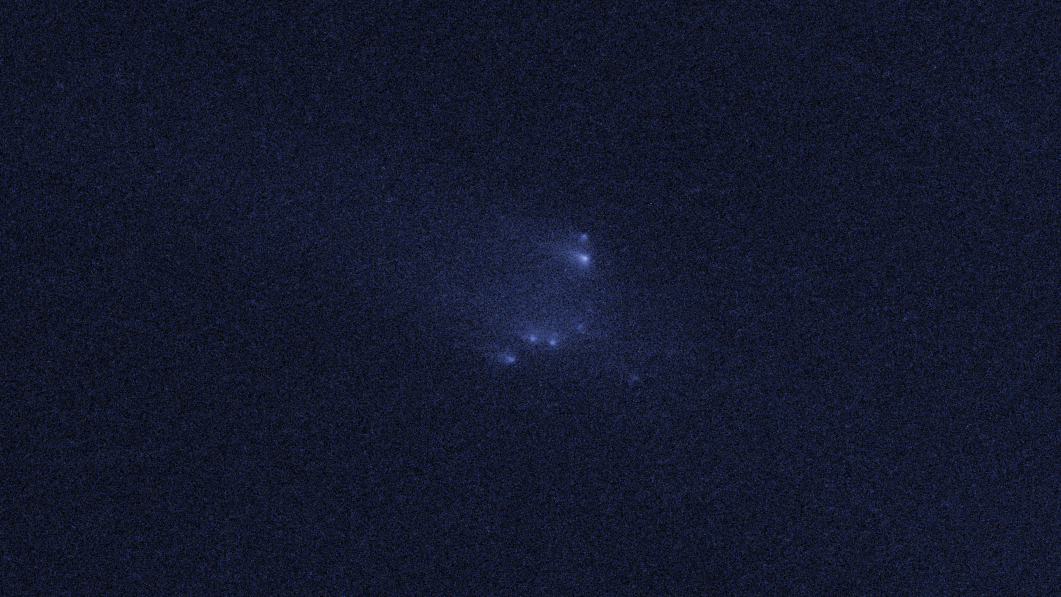

Disintegrating asteroid P/2013 R3 as viewed by Hubble on 14 January 2014

This image shows NASA/ESA Hubble Space Telescope observations of asteroid P/2013 R3. This asteroid has been found to be disintegrating and breaking apart - the first such body ever seen to do this.

This image shows P/2013 R3 as it was seen on 14 January 2014. This frame was not included in the science paper and is additional data.

Credit: NASA, ESA, D. Jewitt (UCLA)